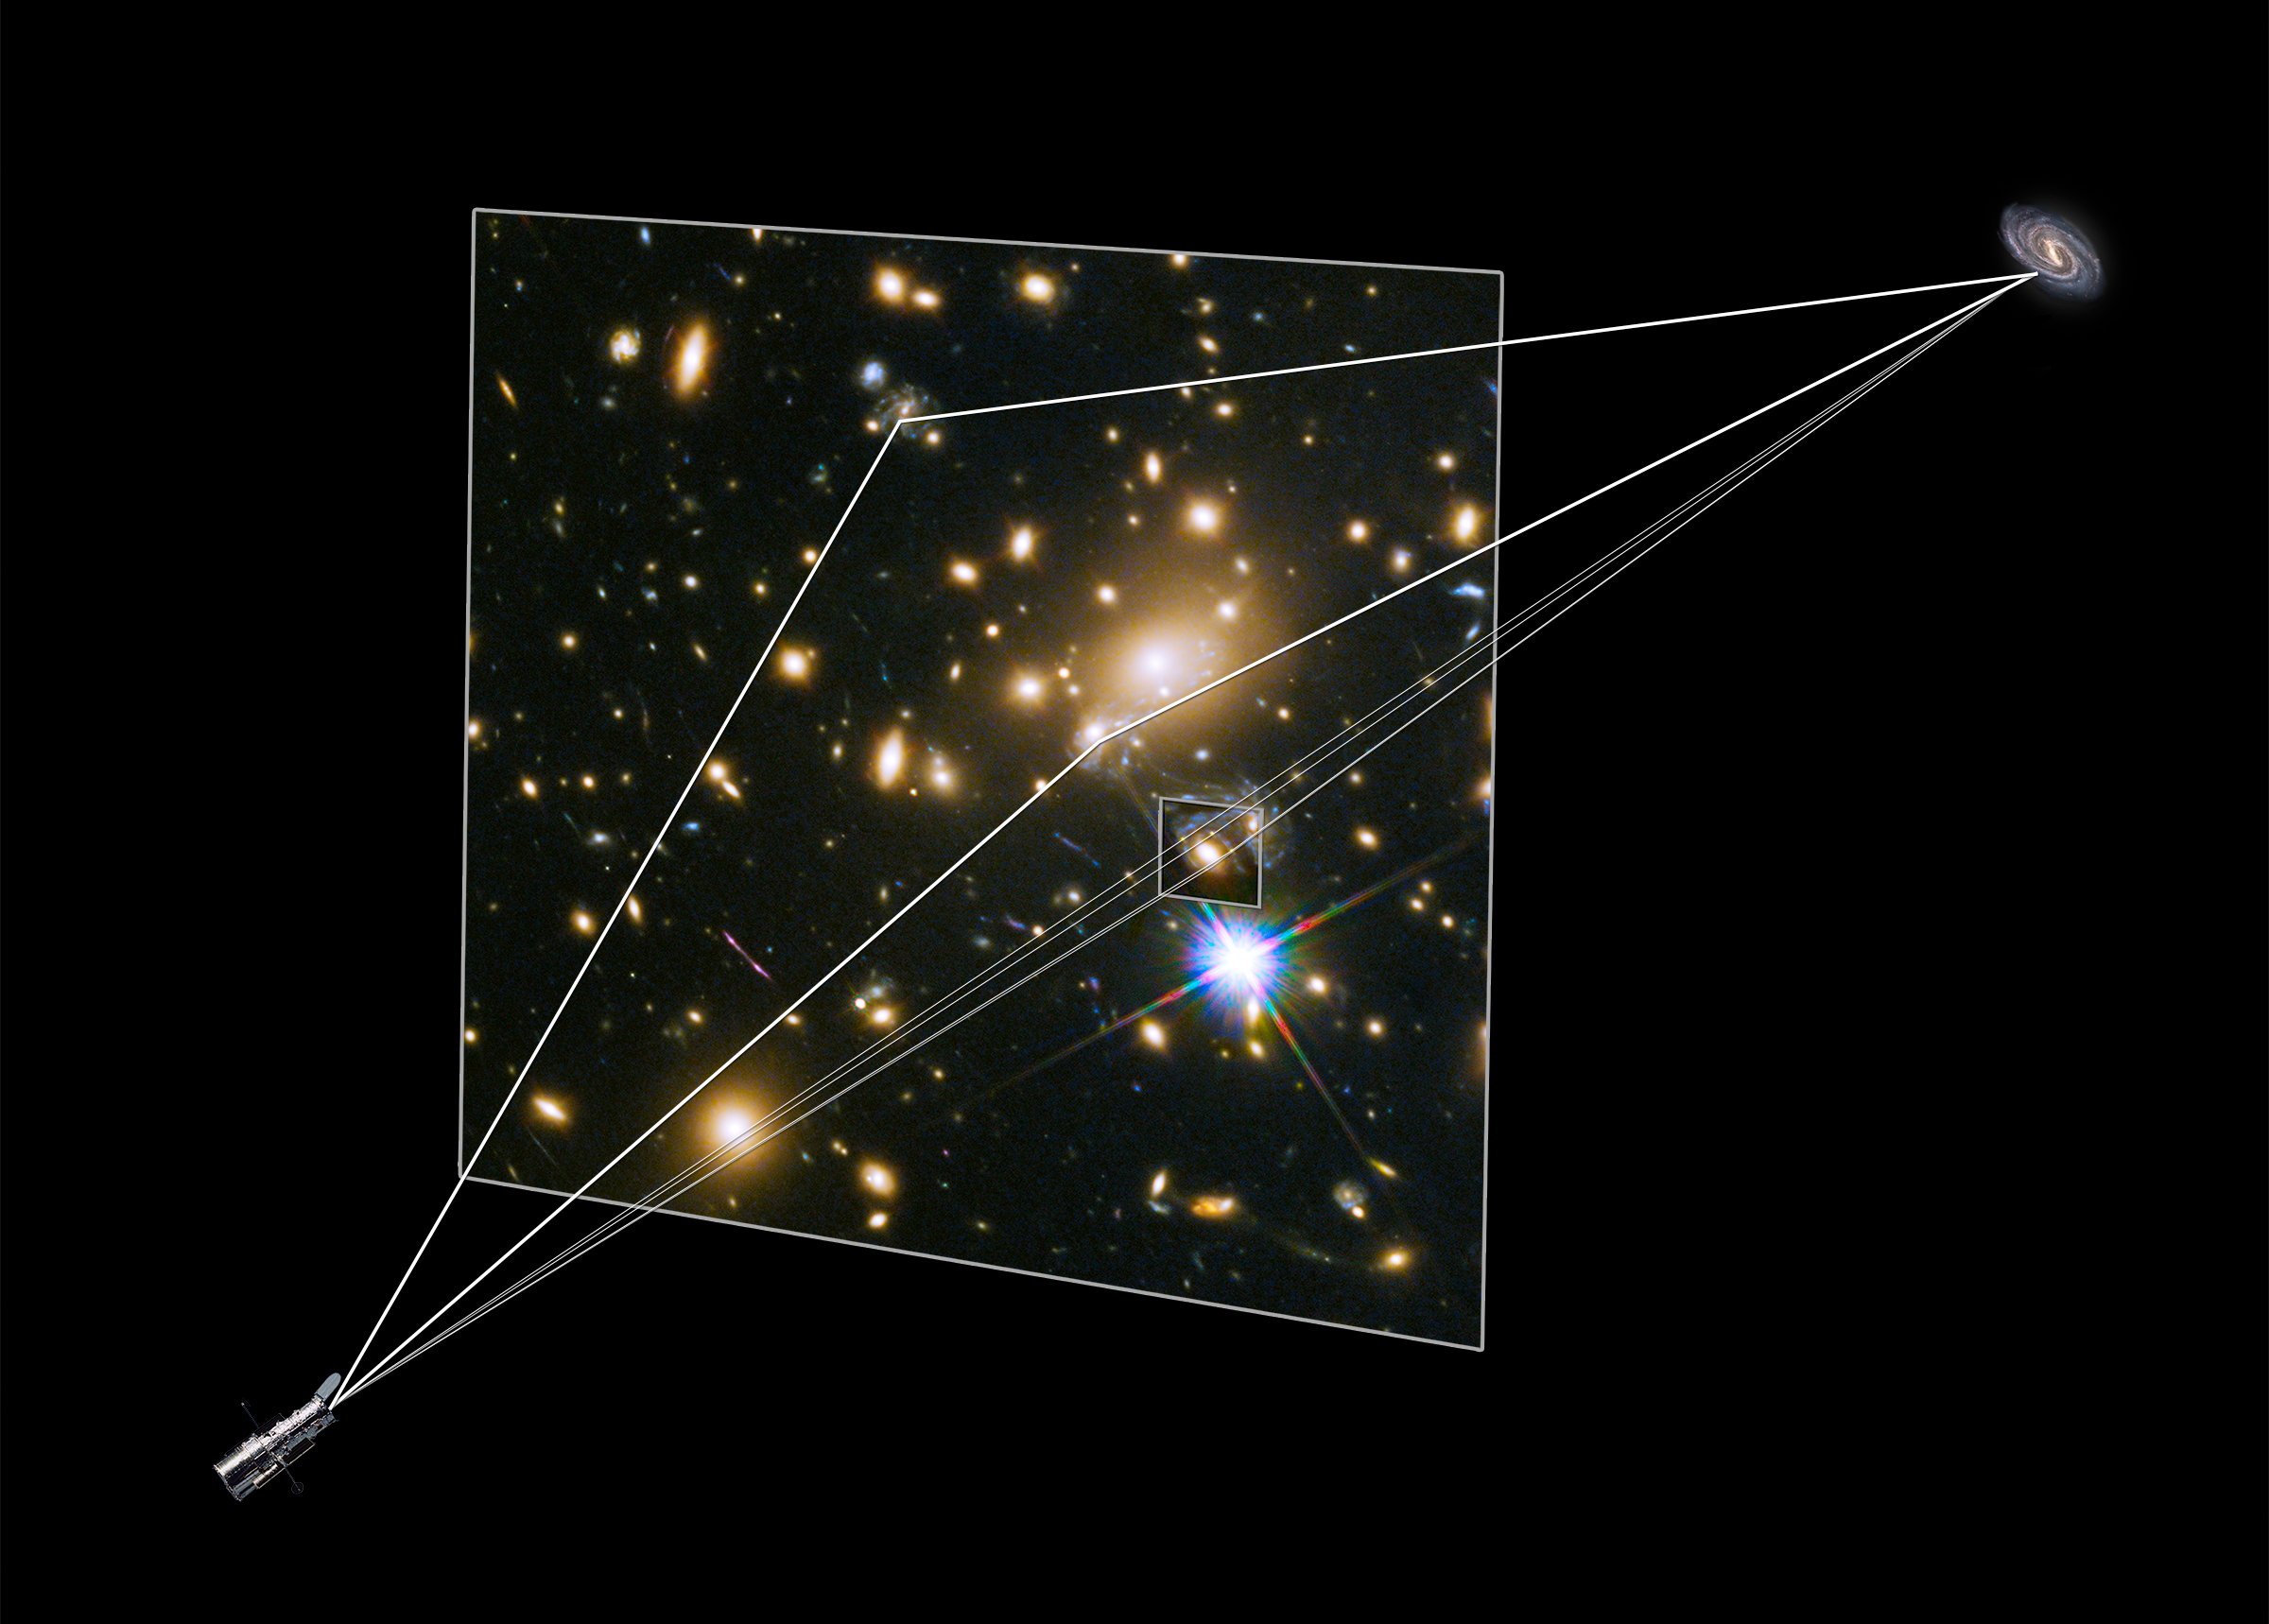

Illustration showing gravitational lensing producing supernova images

This illustration shows how the different images of the Refsdal supernova were created by the huge galaxy cluster MACS J1149.5+2223 in front of it. The light of the Supernova has been magnified and distorted due to gravitational lensing. This effect made the supernova and its host galaxy visible at three different locations.

One of these images was again lensed by an elliptical galaxy within the galaxy cluster, which led to the creation of a formation known as an Einstein cross. This was observed in late 2014.

Credit: NASA & ESA